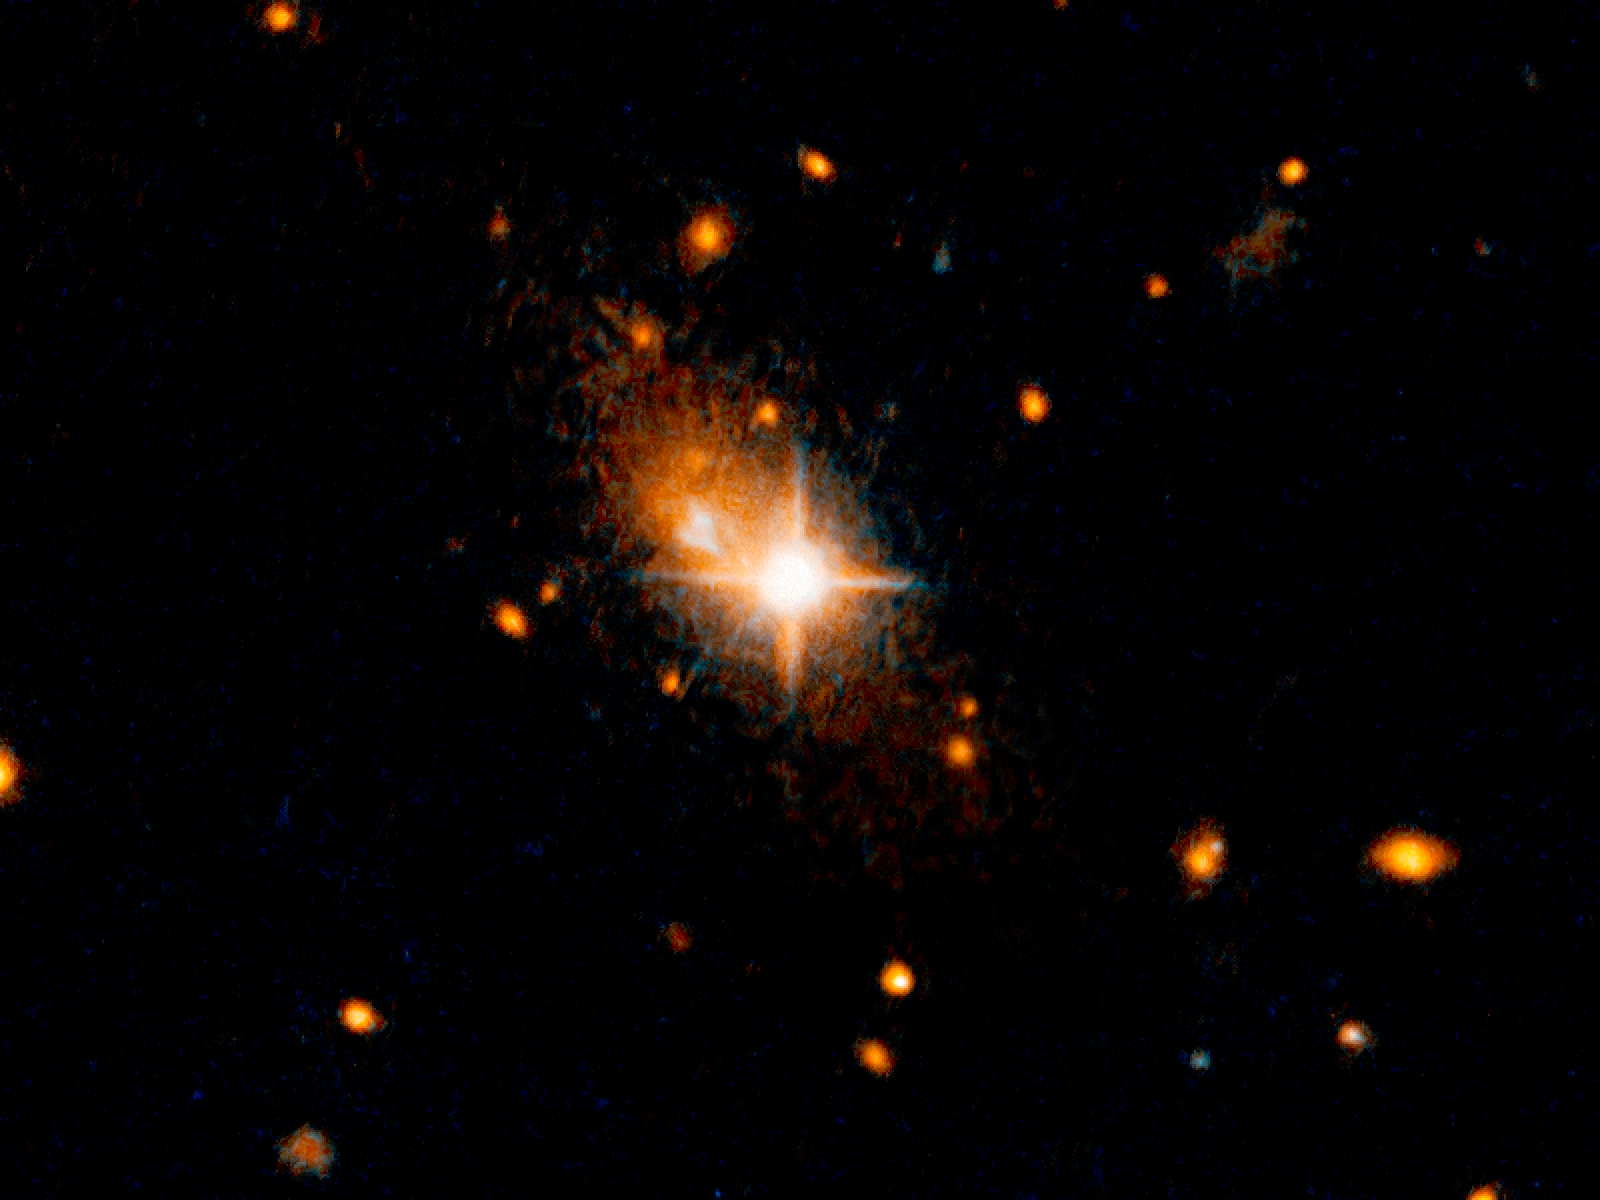

Galaxy with an ejected supermassive black hole

The galaxy 3C186, located about 8 billion years from Earth, is most likely the result of a merger of two galaxies. This is supported by arc-shaped tidal tails, usually produced by a gravitational tug between two colliding galaxies, identified by the scientists. The merger of the galaxies also led to a merger of the two supermassive black holes in their centres, and the resultant black hole was then kicked out of its parent galaxy by the gravitational waves created by the merger.

The bright, star-like looking quasar can be seen in the centre of the image. Its former host galaxy is the faint, extended object behind it.

Credit: NASA, ESA, and M. Chiaberge (STScI/ESA)